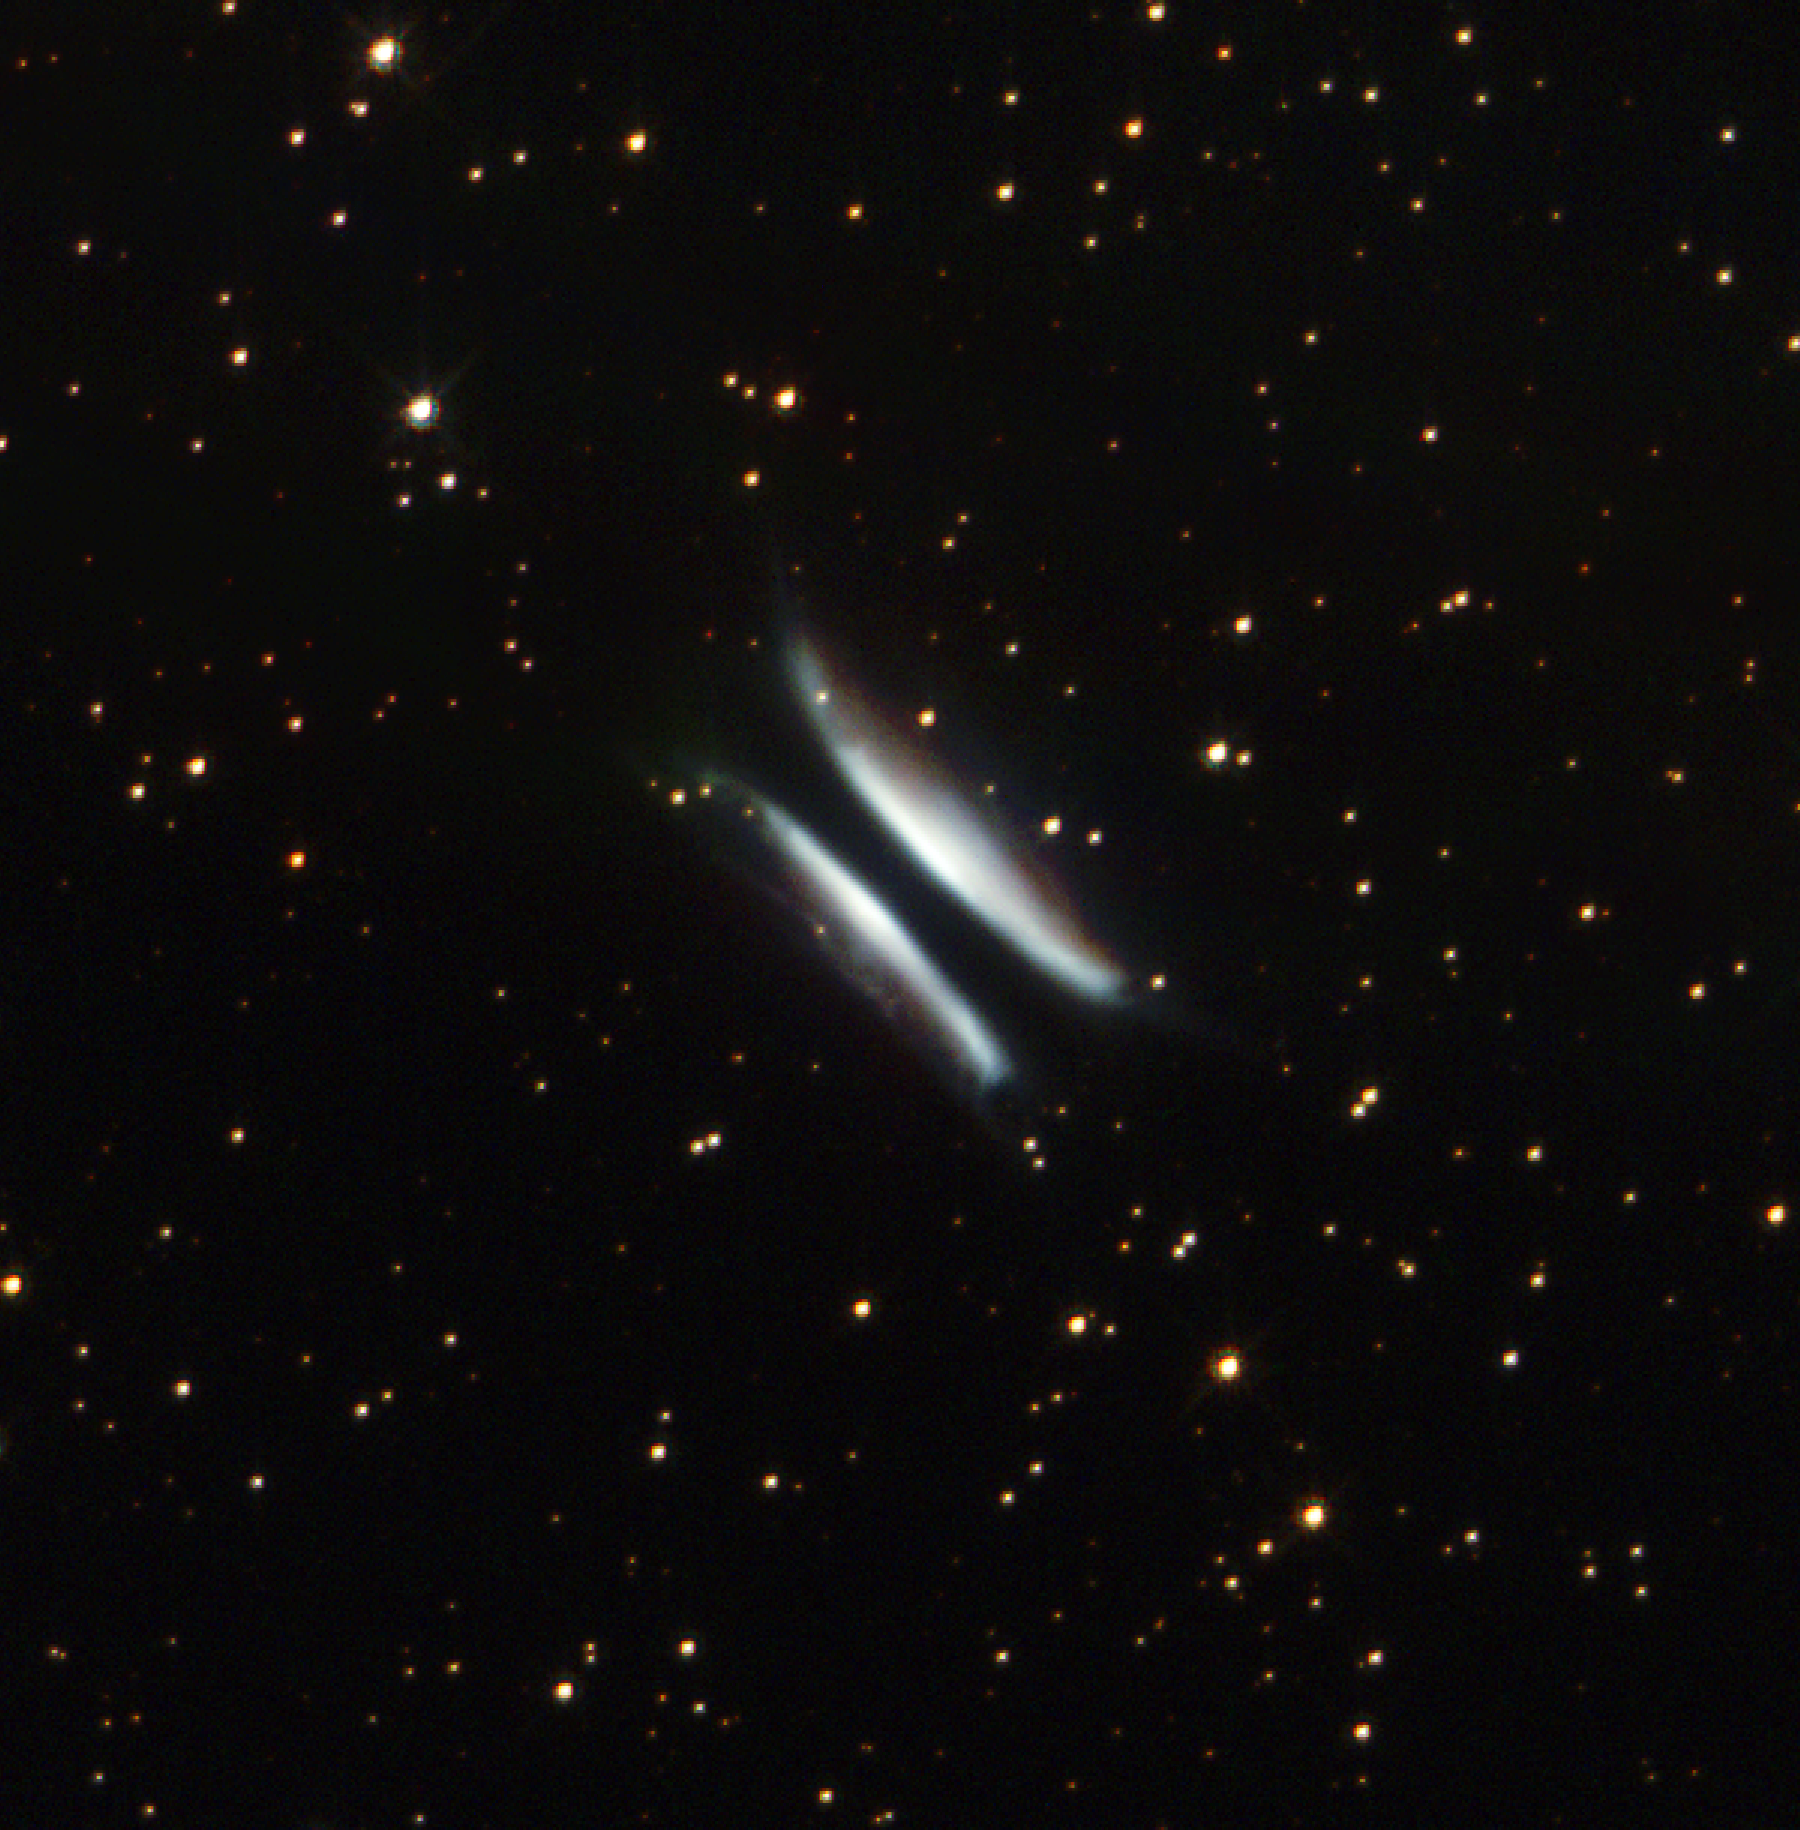

A Cosmic Hamburger

Hold the pickles; hold the lettuce. Space is serving up giant hamburgers. The NASA/ESA Hubble Space Telescope has snapped a photograph of a strange object that bears an uncanny resemblance to a hamburger.

The object, nicknamed Gomez's Hamburger, is a sun-like star nearing the end of its life. It already has expelled large amounts of gas and dust and is on its way to becoming a colorful, glowing planetary nebula. The ingredients for the giant celestial hamburger are dust and light. The hamburger buns are light reflecting off dust and the patty is the dark band of dust in the middle.

Credit: NASA/ESA and The Hubble Heritage Team (STScI/AURA)